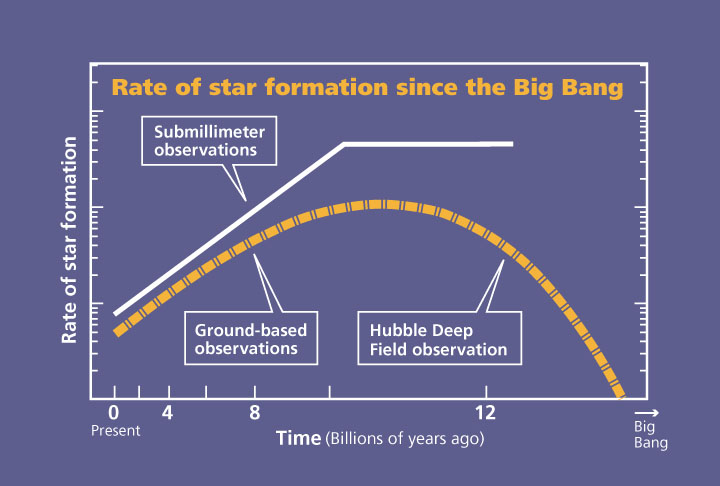

Plot of star formation rate since the Big Bang

Rates compared with what submillmeter observations imply.

Credit: NASA & ESA